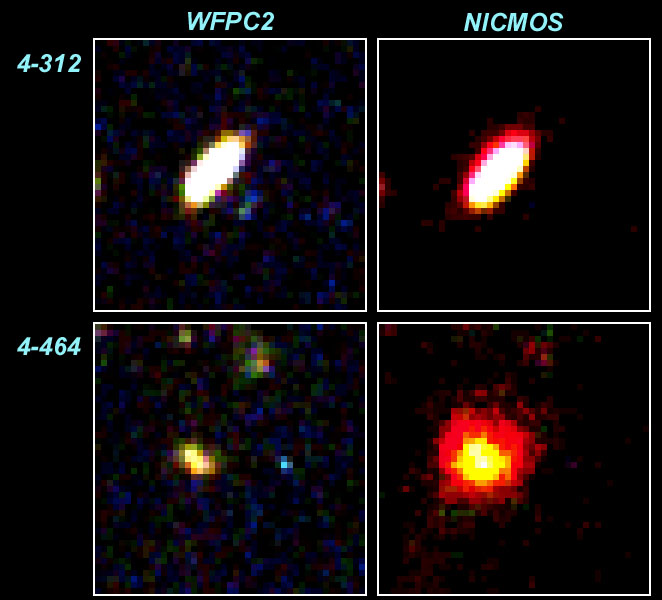

Blue galaxies on WFPC2 field not detected with NICMOS

Blue galaxies on WFPC2 field not detected with NICMOS

Credit: Rodger I. Thompson (University of Arizona) and NASA/ESA